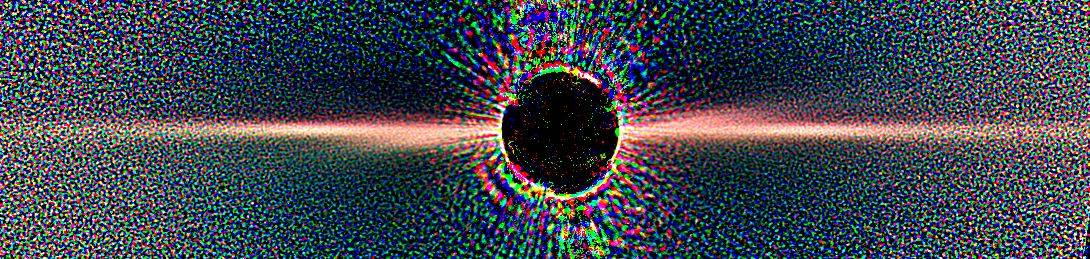

Beta Pictoris - Star with Disk - Not Annotated

Detailed images of the nearby star Beta Pictoris, taken by NASA/ESA Hubble Space Telescope, confirm the existence of not one but two dust disks encircling the star. The images offer tantalizing new evidence for at least one Jupiter-size planet orbiting Beta Pictoris.

The finding ends a decade of scientific speculation that an odd warp in the young star's debris disk may actually be another inclined disk. The recent Hubble Advanced Camera for Surveys view - the best visible-light image of Beta Pictoris - clearly shows a distinct secondary disk that is tilted by about 4 degrees from the main disk. The secondary disk is visible out to roughly 24 billion miles (almost 40 billion kilometres) from the star, and probably extends even farther, said astronomers. This Hubble image of Beta Pictoris clearly shows a primary dust disk and a much fainter secondary dust disk. Astronomers used the Advanced Camera's coronagraph to block out the light from the bright star.

Credit: NASA, ESA, D. Golimowski (Johns Hopkins University), D. Ardila (IPAC), J. Krist (JPL), M. Clampin (GSFC), H. Ford (JHU), and G. Illingworth (UCO/Lick) and the ACS Science Team